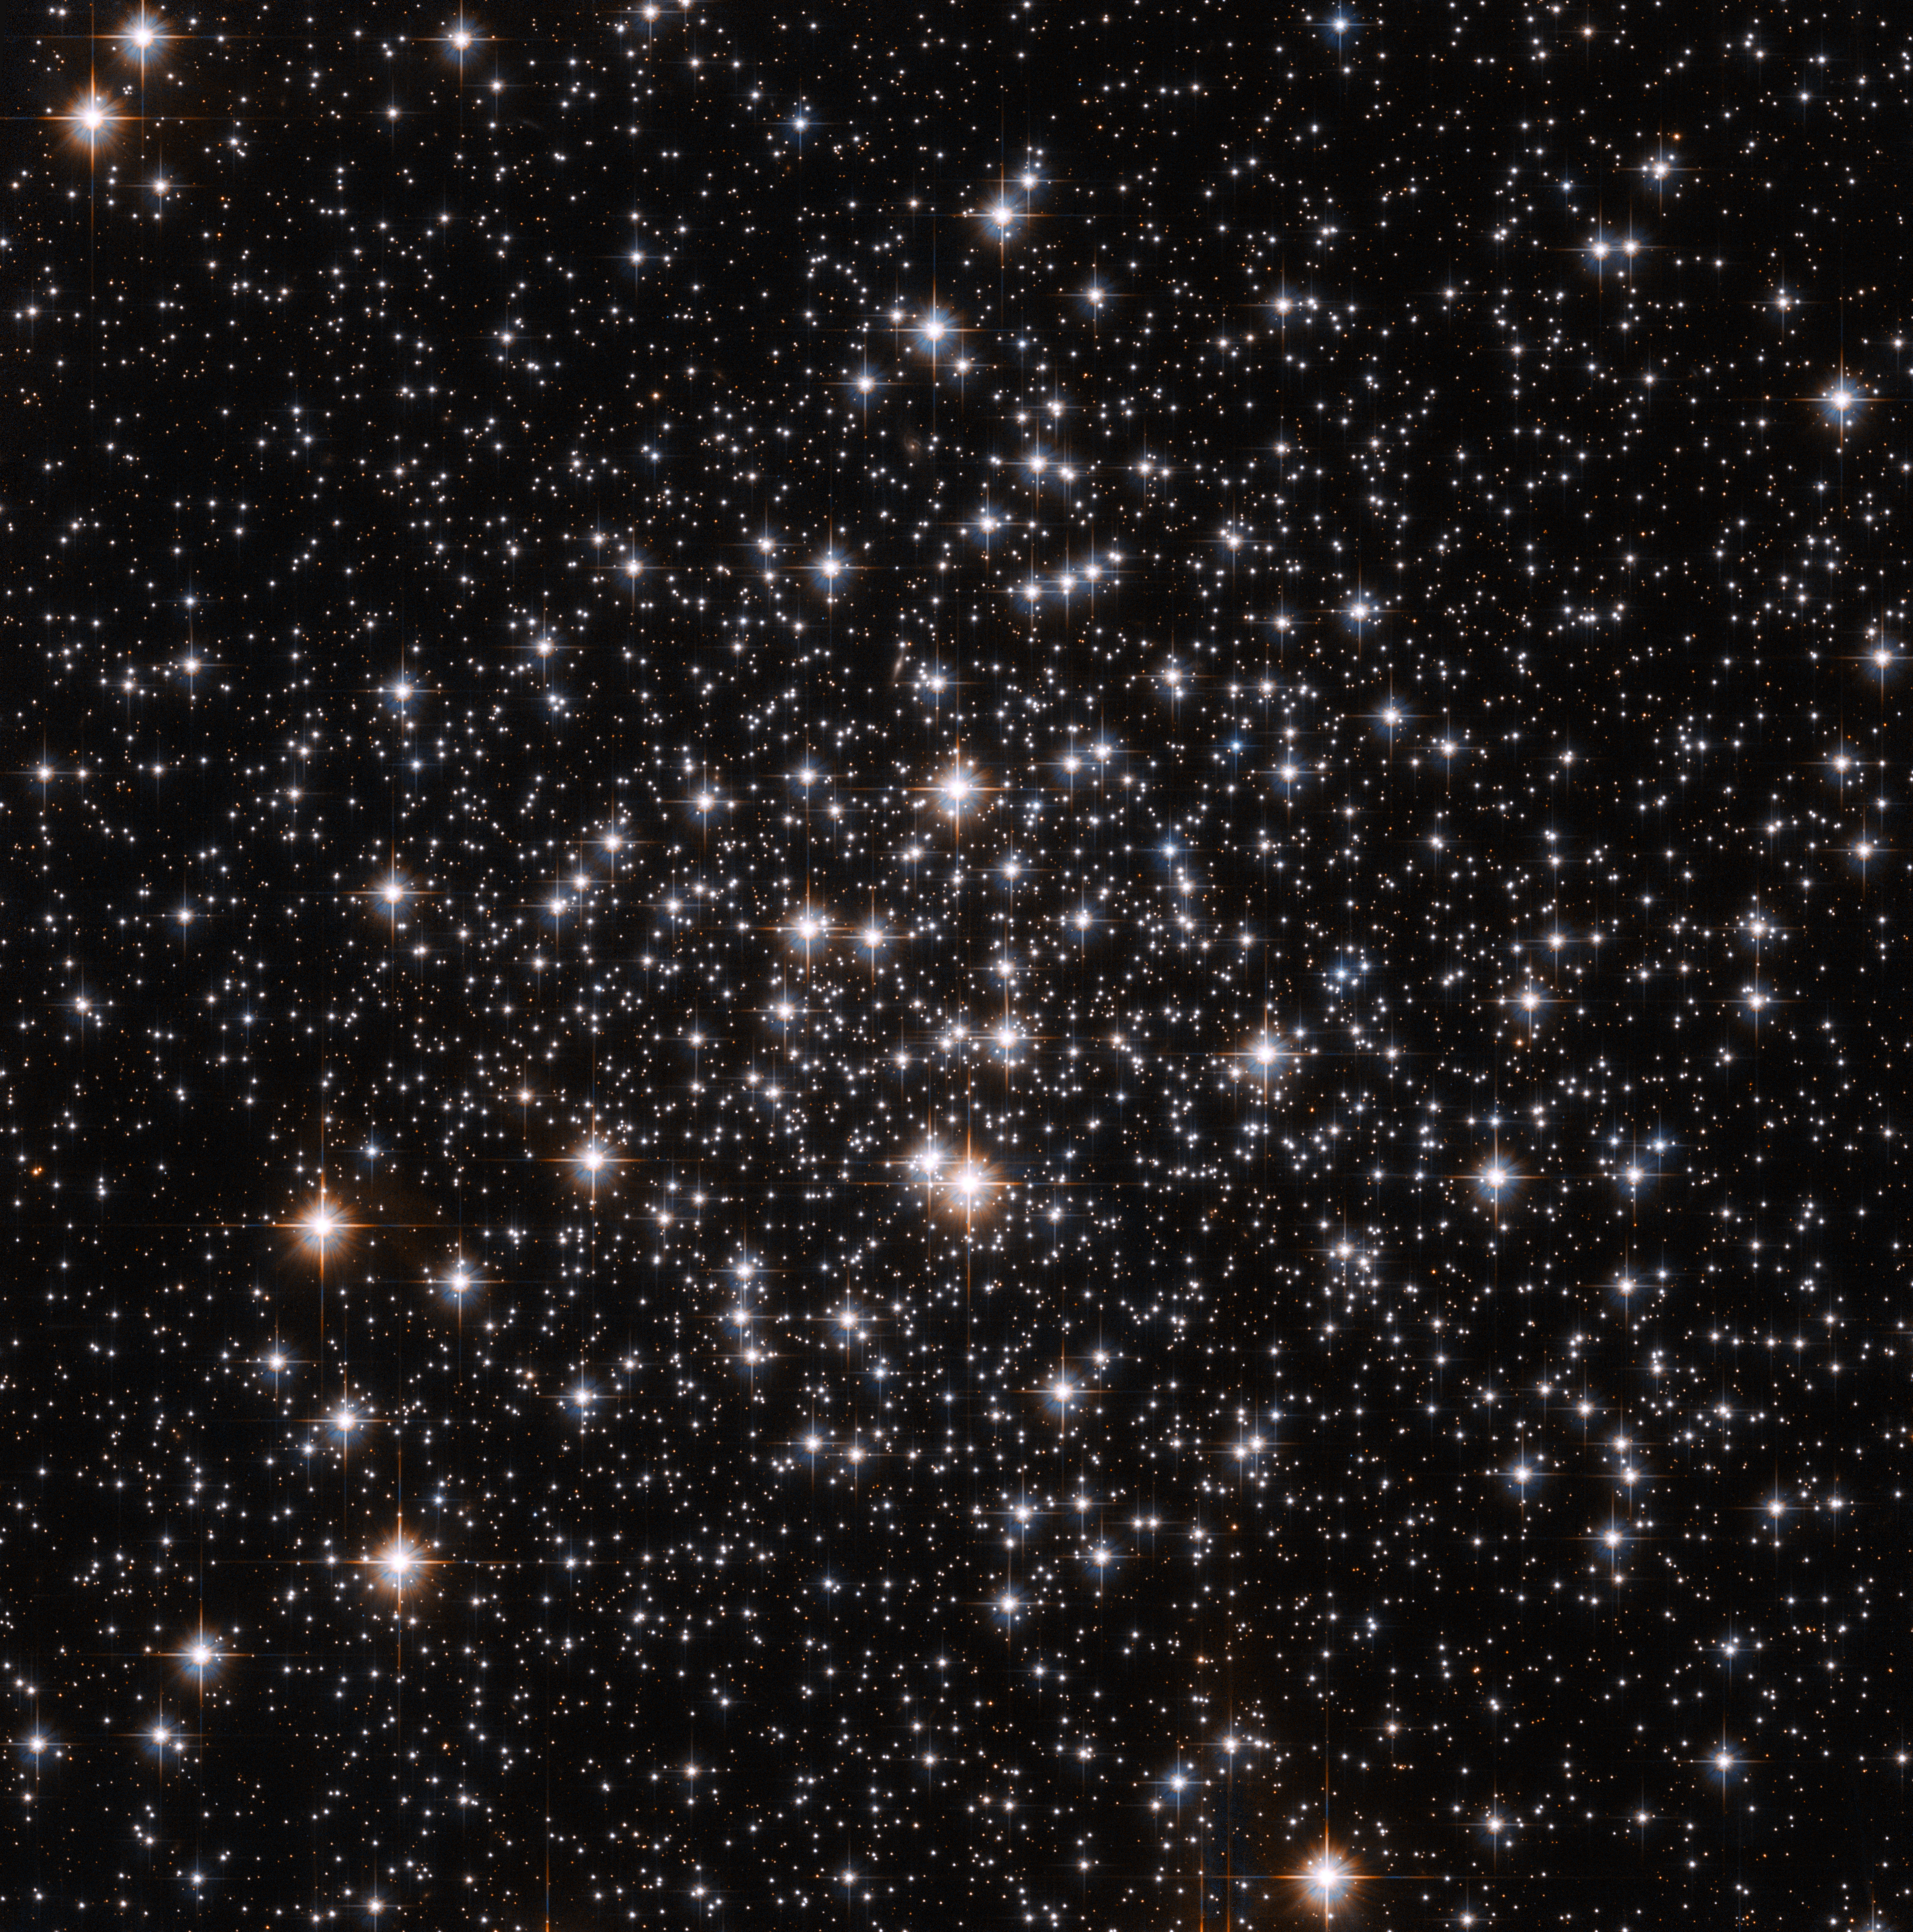

Messier 71: an unusual globular cluster

This spectacular NASA/ESA Hubble Space Telescope image shows a bright scattering of stars in the small constellation of Sagitta (the Arrow). This is the centre of the globular cluster Messier 71, a great ball of ancient stars on the edge of our galaxy around 13 000 light-years from Earth. M71 is around 27 light-years across.

Globular clusters are like galactic suburbs, pockets of stars that exist on the edge of major galaxies. These clusters are tightly bound together by their gravitational attraction, hence their spherical shape and their name: globulus means “little sphere” in Latin.

Around 150 such globular clusters are known to exist around our Milky Way, each one of them containing several hundred thousand stars.

Messier 71 has been known for a long time, having been first spotted in the mid eighteenth century by Swiss astronomer Jean-Philippe de Cheseaux. Cheseaux discovered a number of nebulae in his career, and also spent much time studying religion: one posthumously published work attempted to derive the exact date of Christ’s crucifixion from astronomical events noted in the Bible.

Despite being a familiar object, Messier 71’s precise nature was disputed until recently. Was it simply an open cluster, a loosely bound group of stars? This was for many years the dominant view. But in the 1970s, astronomers came to the view that it is in fact a relatively sparse globular cluster.

The stars in Messier 71, as is usual in such clusters, are relatively old, at around 9 to 10 billion years, and consequently are low in elements other than hydrogen and helium.

This picture was created from images taken with the Wide Field Channel of the Advanced Camera for Surveys on Hubble. It is a combination of images taken through yellow (F606W — coloured blue) and near-infrared (F814W — coloured red) filters. The exposure times were 304 s and 324 s respectively. The field of view is about 3.4 arcminutes across.

Credit: ESA/Hubble and NASA